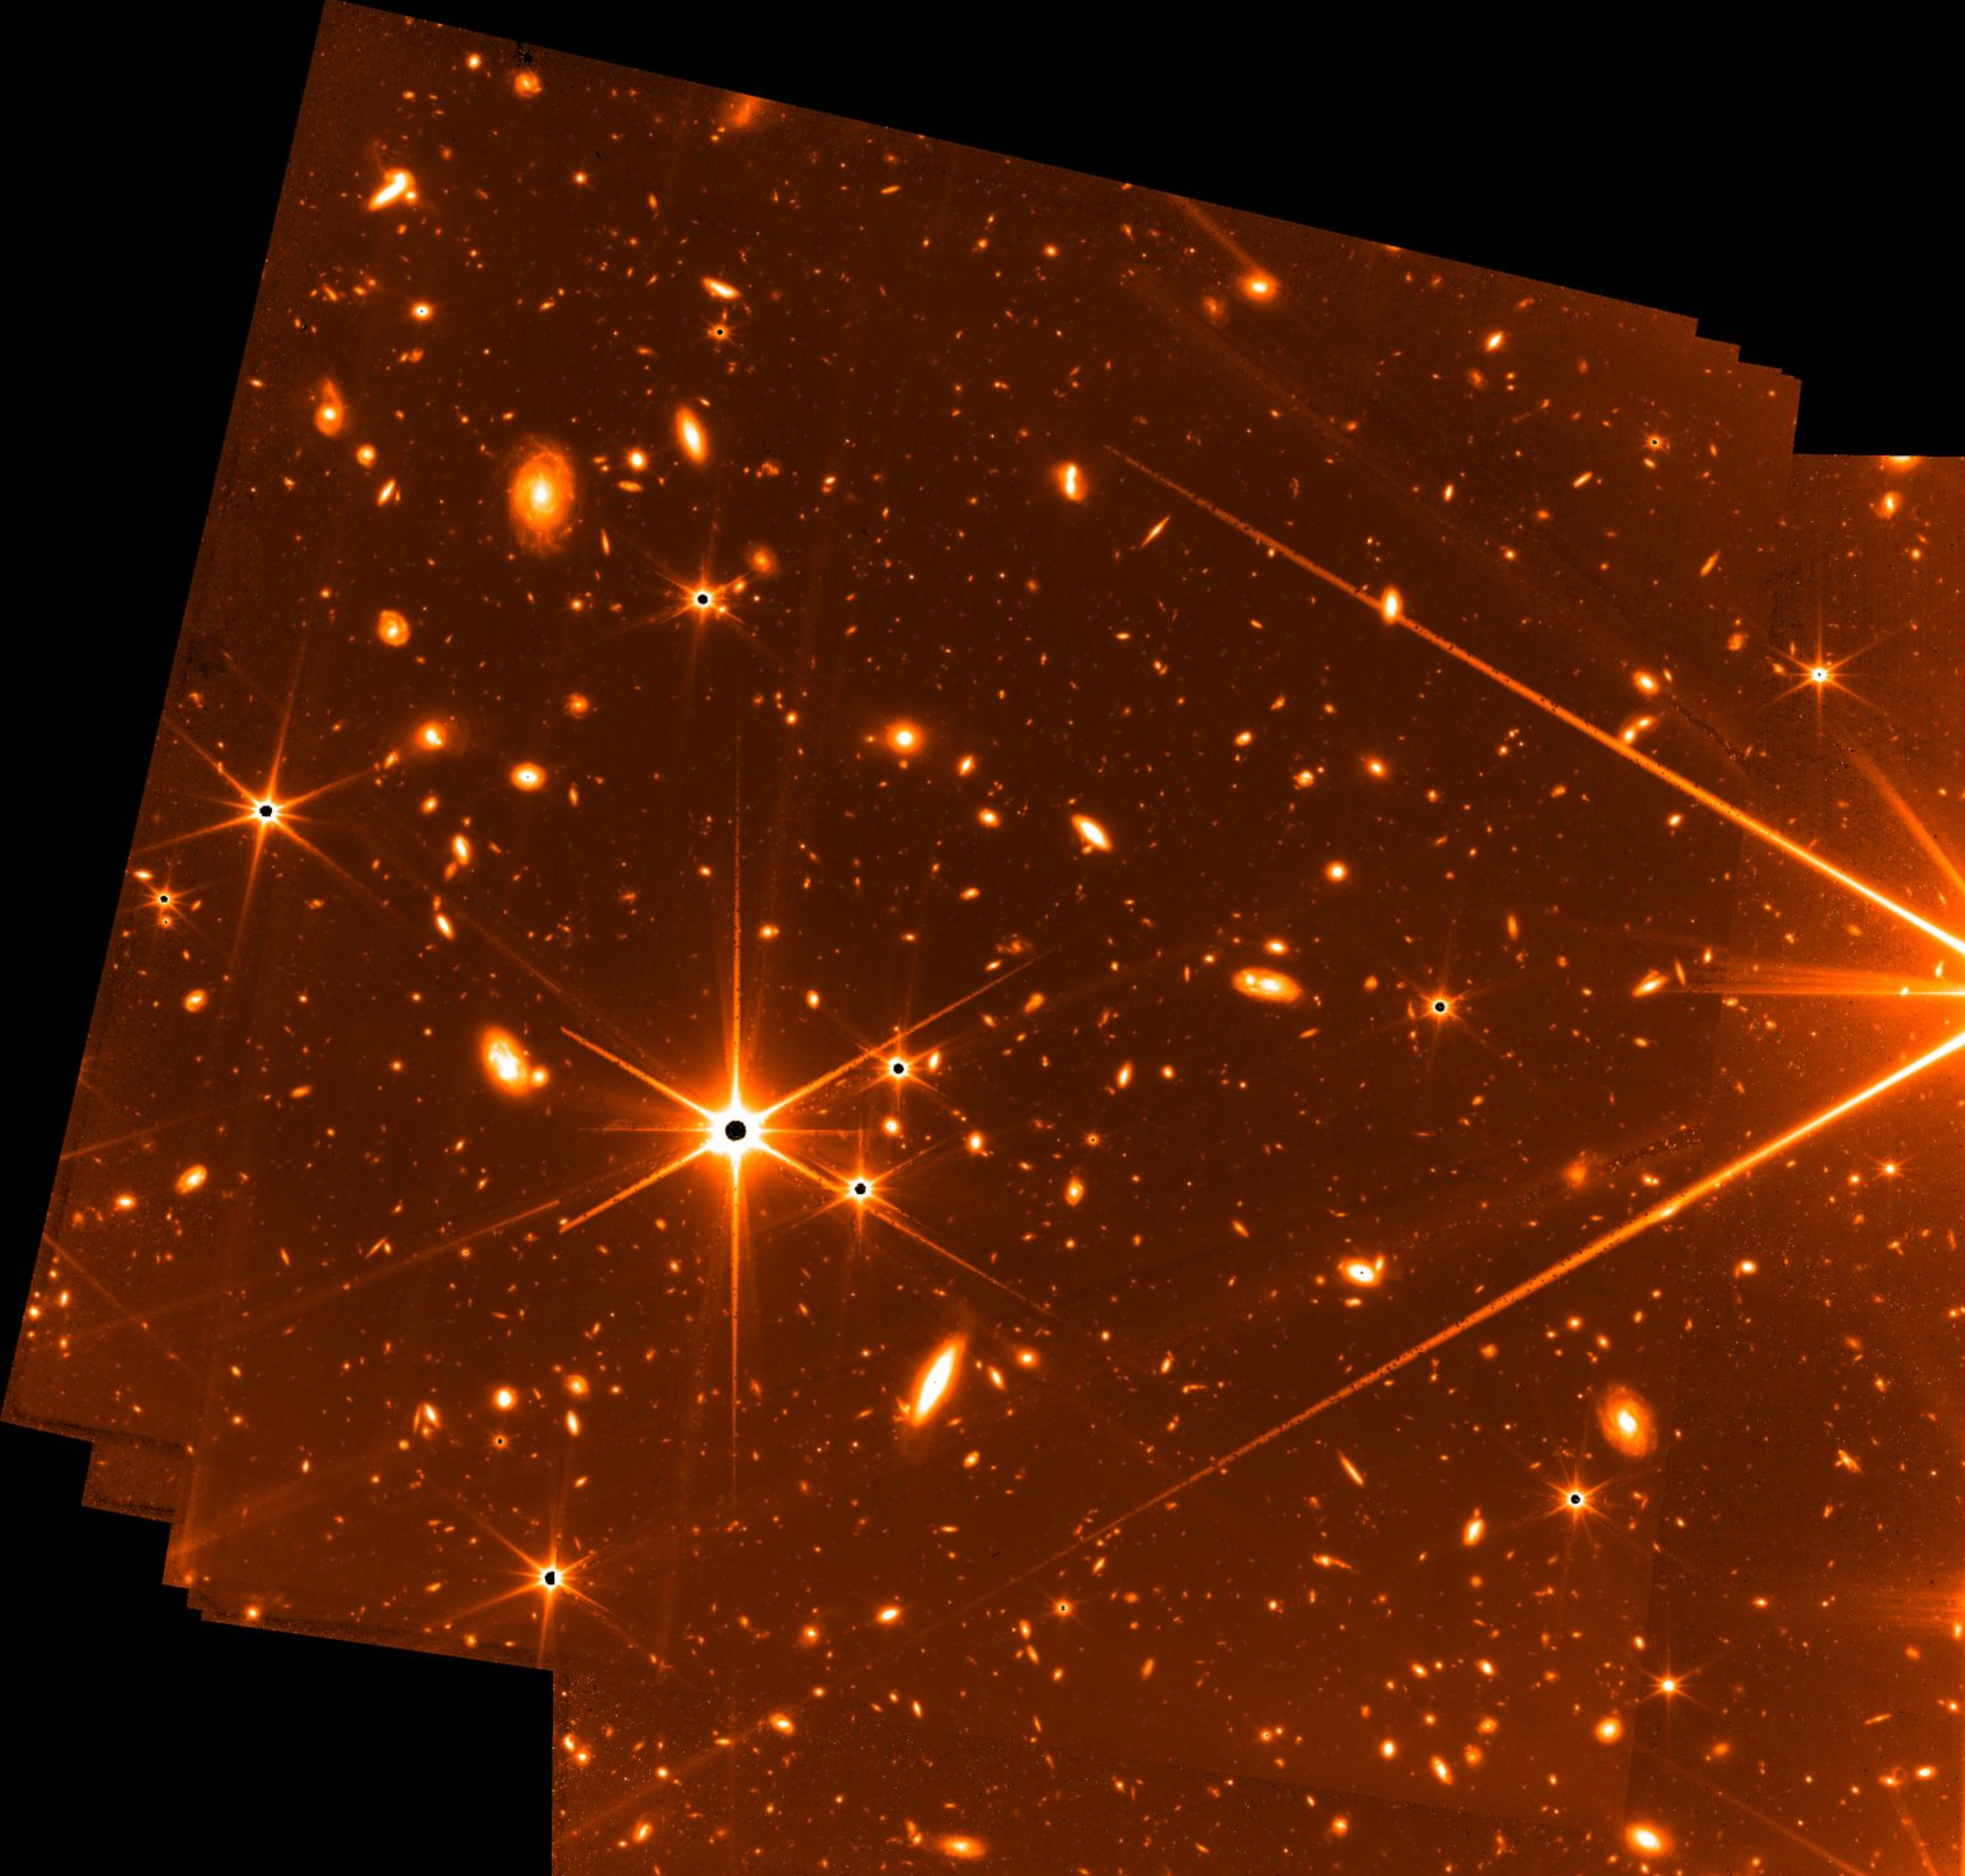

Fine Guidance Sensor Test Image

Webb’s Fine Guidance Sensor (FGS) – developed by the Canadian Space Agency – has captured a special view of stars and galaxies that provides a tantalising glimpse at what the telescope’s science instruments will reveal in the coming weeks, months, and years.

The FGS has always been capable of capturing imagery, but its primary purpose is to enable accurate science measurements and imaging with precision pointing. When it does capture imagery, the imagery is typically not kept: Given the limited communications bandwidth between L2 and Earth, Webb only sends data from up to two science instruments at a time. But during a week-long stability test in May, it occurred to the team that they could keep the imagery that was being captured because there was available data transfer bandwidth.

The resulting engineering test image has some rough-around-the-edges qualities to it. It was not optimised to be a science observation; rather, the data was taken to test how well the telescope could stay locked onto a target, but it does hint at the power of the telescope. It carries a few hallmarks of the views Webb has produced during its post launch preparations. Bright stars stand out with their six, long, sharply defined diffraction spikes – an effect due to Webb’s six-sided mirror segments. Beyond the stars, galaxies fill nearly the entire background.

The result – using 72 exposures over 32 hours – is among the deepest images of the universe ever taken, according to Webb scientists. When FGS’ aperture is open, it is not using colour filters like the other science instruments – meaning it is impossible to study the age of the galaxies in this image with the rigour needed for scientific analysis. But even when capturing unplanned imagery during a test, FGS is capable of producing stunning views of the cosmos.

Credit: NASA, CSA, and FGS team.